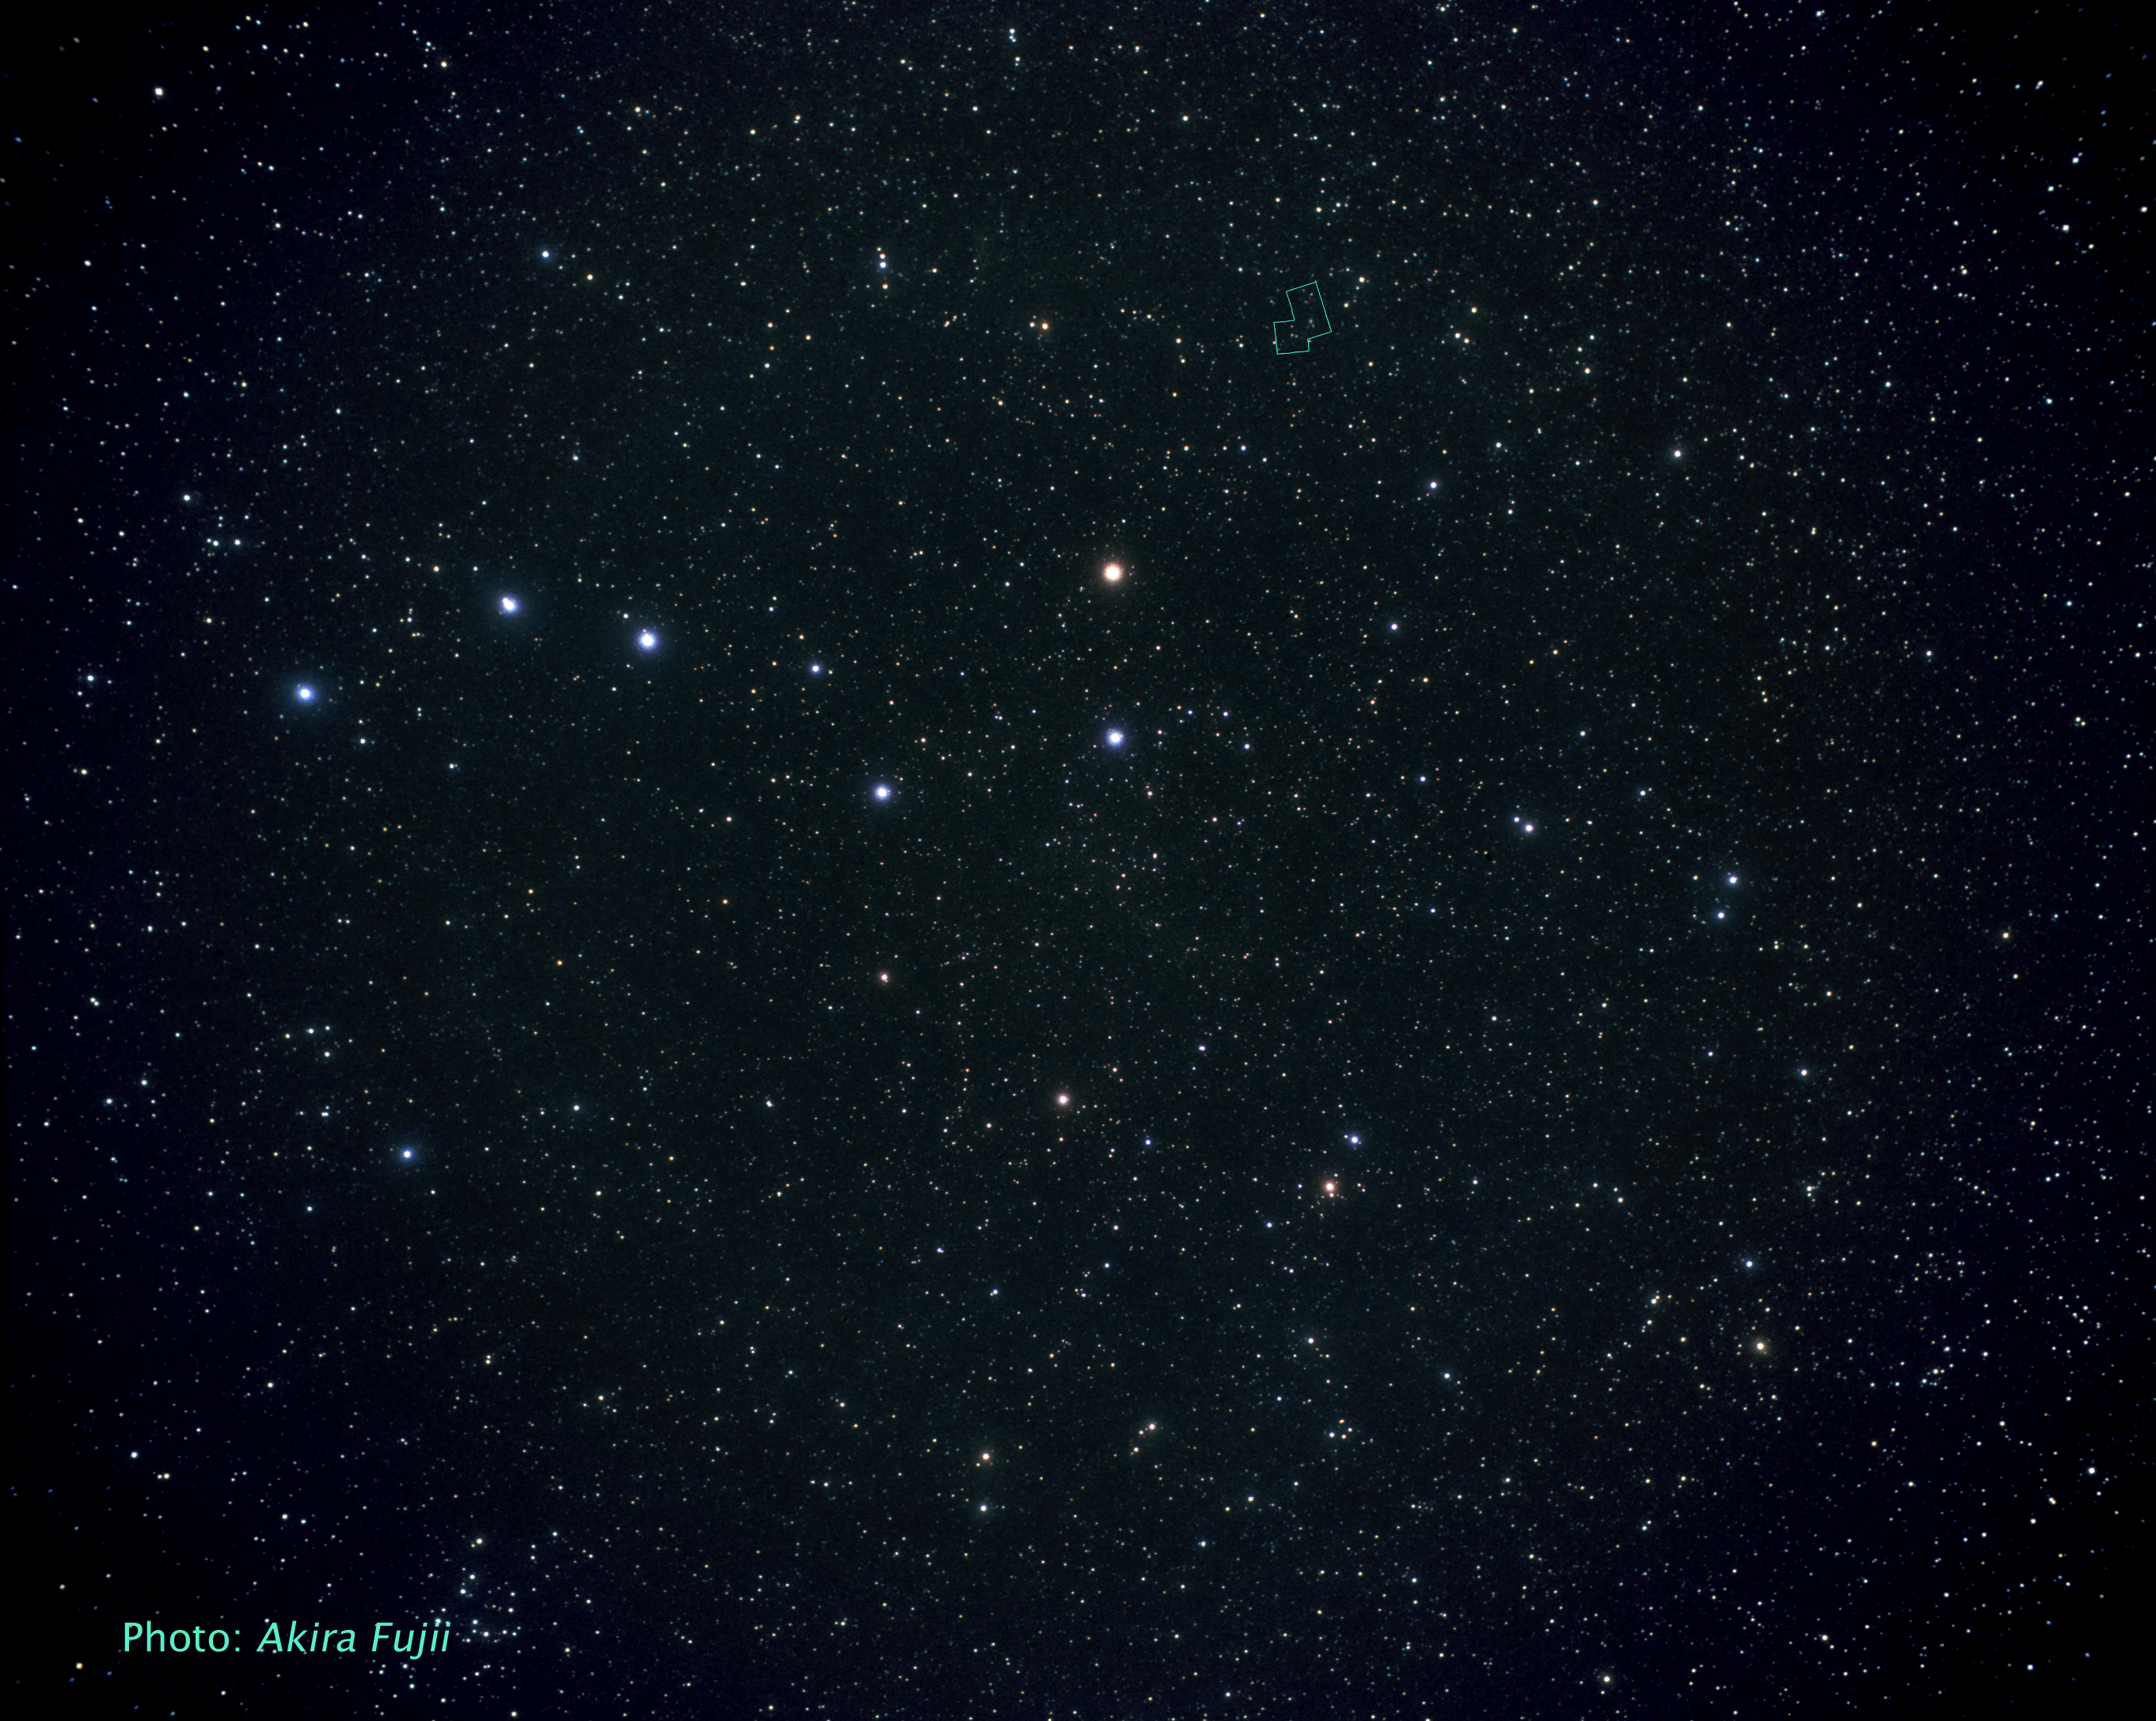

The Ursa Major constellation (ground-based image)

The galaxy Messier 82 is located 12 million light-years away. It appears high in the northern spring sky in the direction of the constellation Ursa Major, the Great Bear. Here Ursa Major is seen in a ground-based image taken by Akira Fujii.

Credit: Akira Fujii